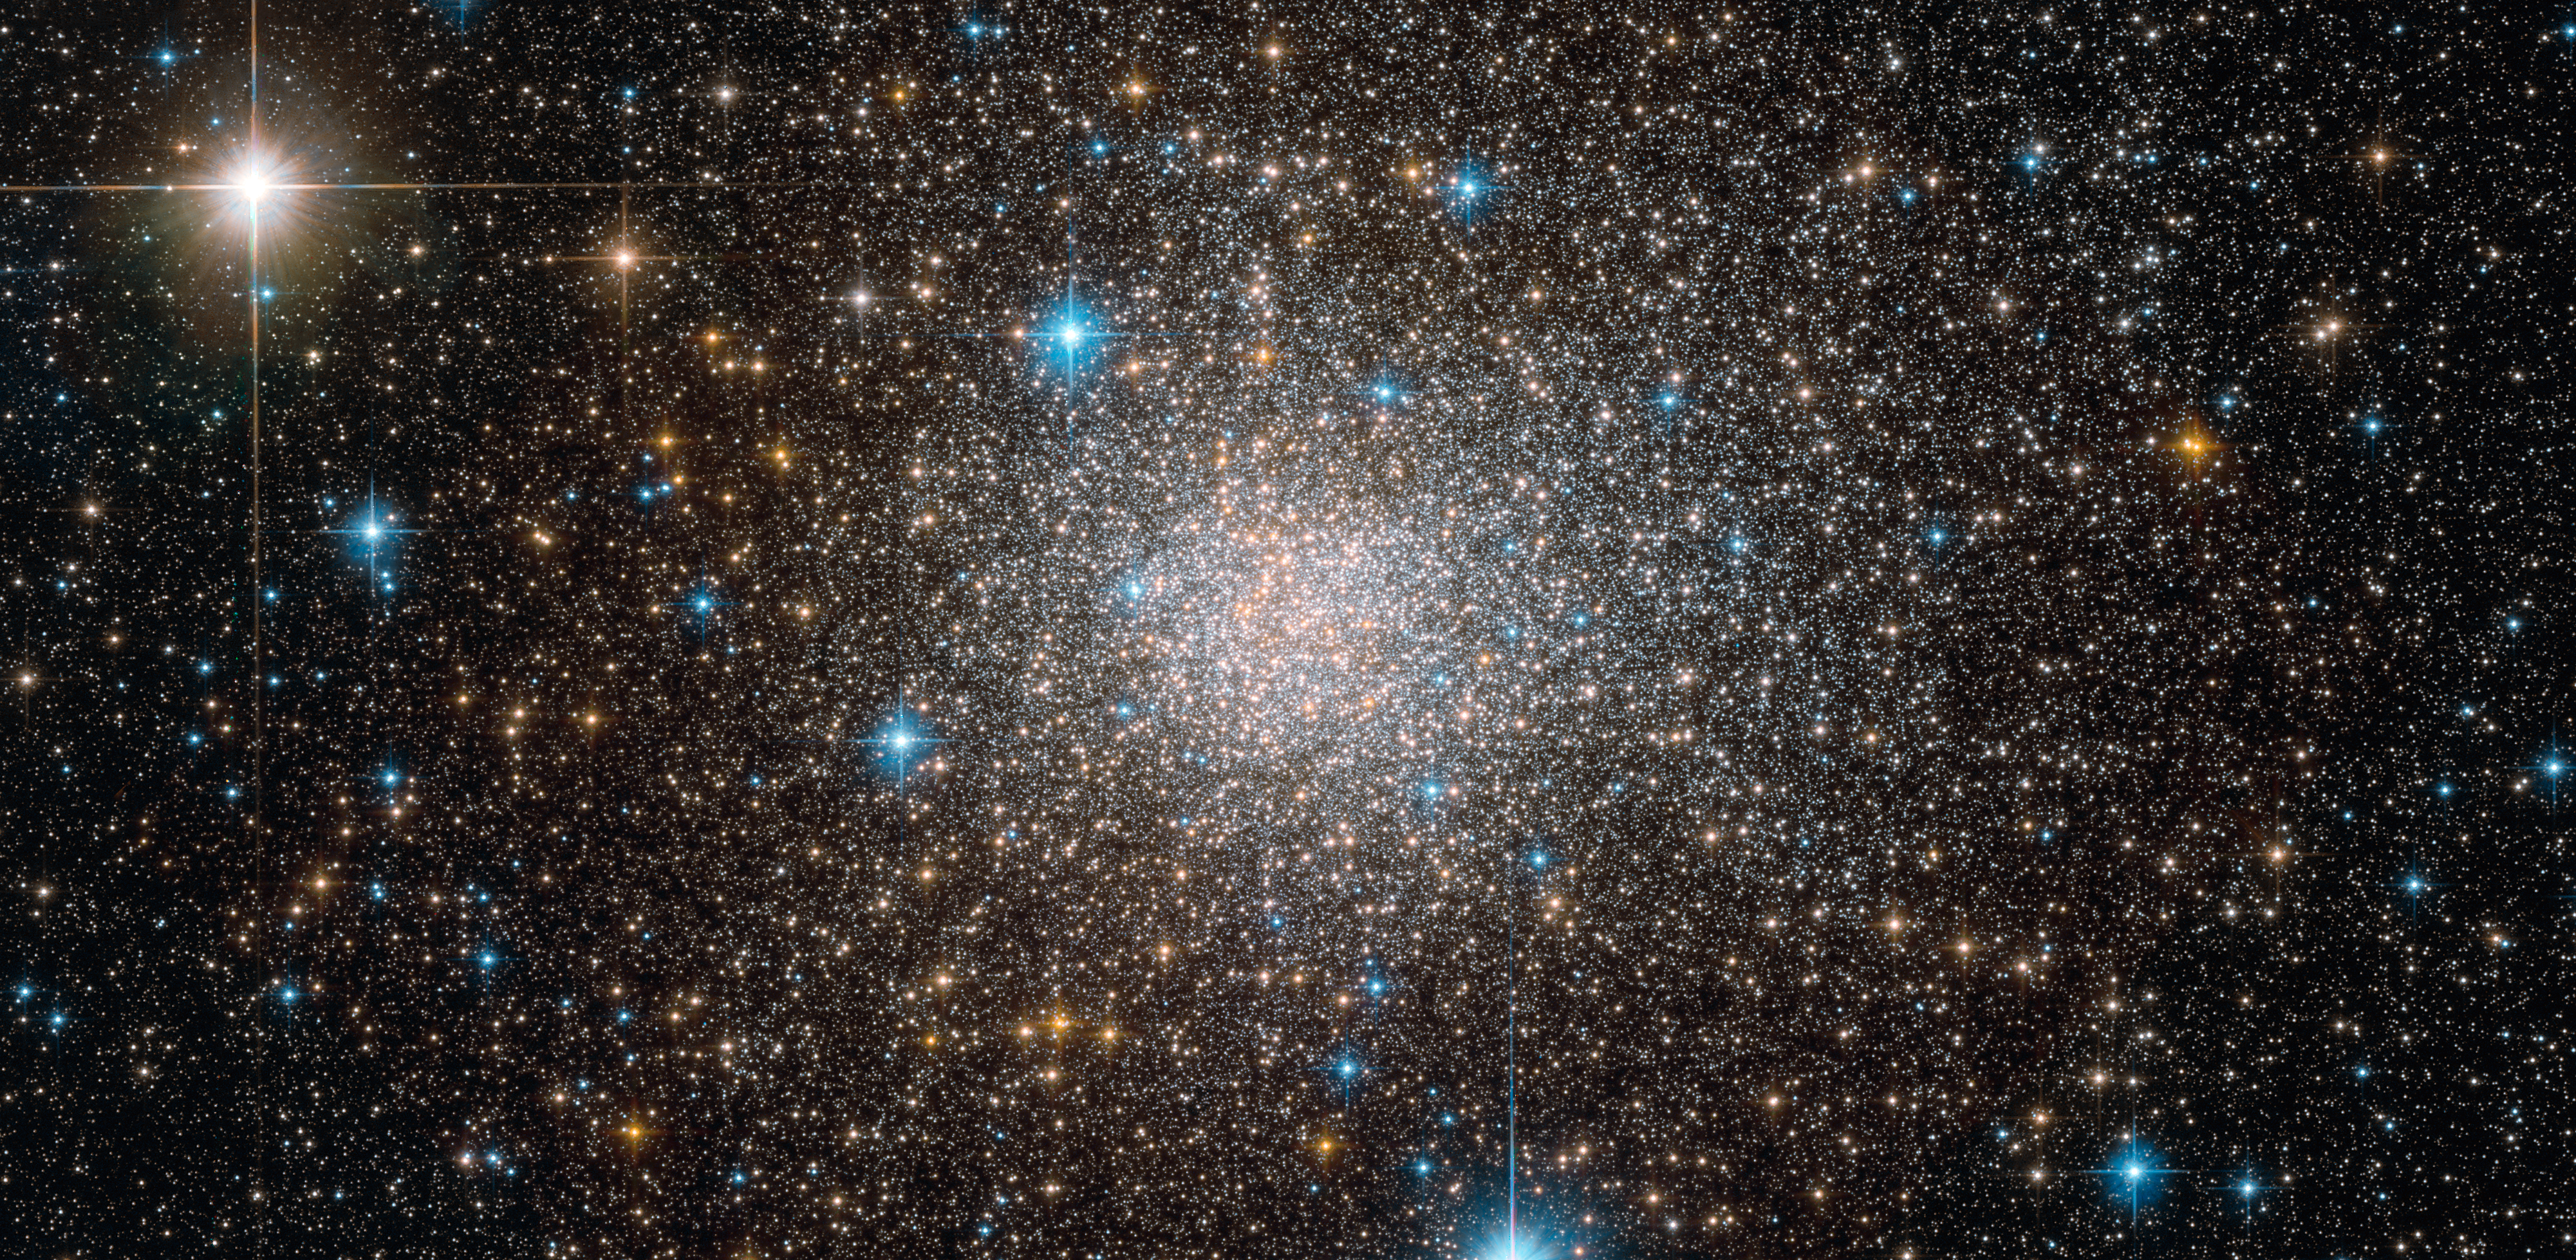

The unusual cluster Terzan

Peering through the thick dust clouds of the galactic bulge an international team of astronomers has revealed the unusual mix of stars in the stellar cluster known as Terzan 5. The new results indicate that Terzan 5 is in fact one of the bulge's primordial building blocks, most likely the relic of the very early days of the Milky Way.

Observations were made with the Wide Field Camera 3 (WFC3) on board the Hubble, the Multi-conjugate Adaptive Optics Demonstrator (MAD) instrument on ESO's Very Large Telescope and the second generation Near Infrared Camera at the Keck Telescope.

Credit: NASA/ESA/Hubble/F. Ferraro